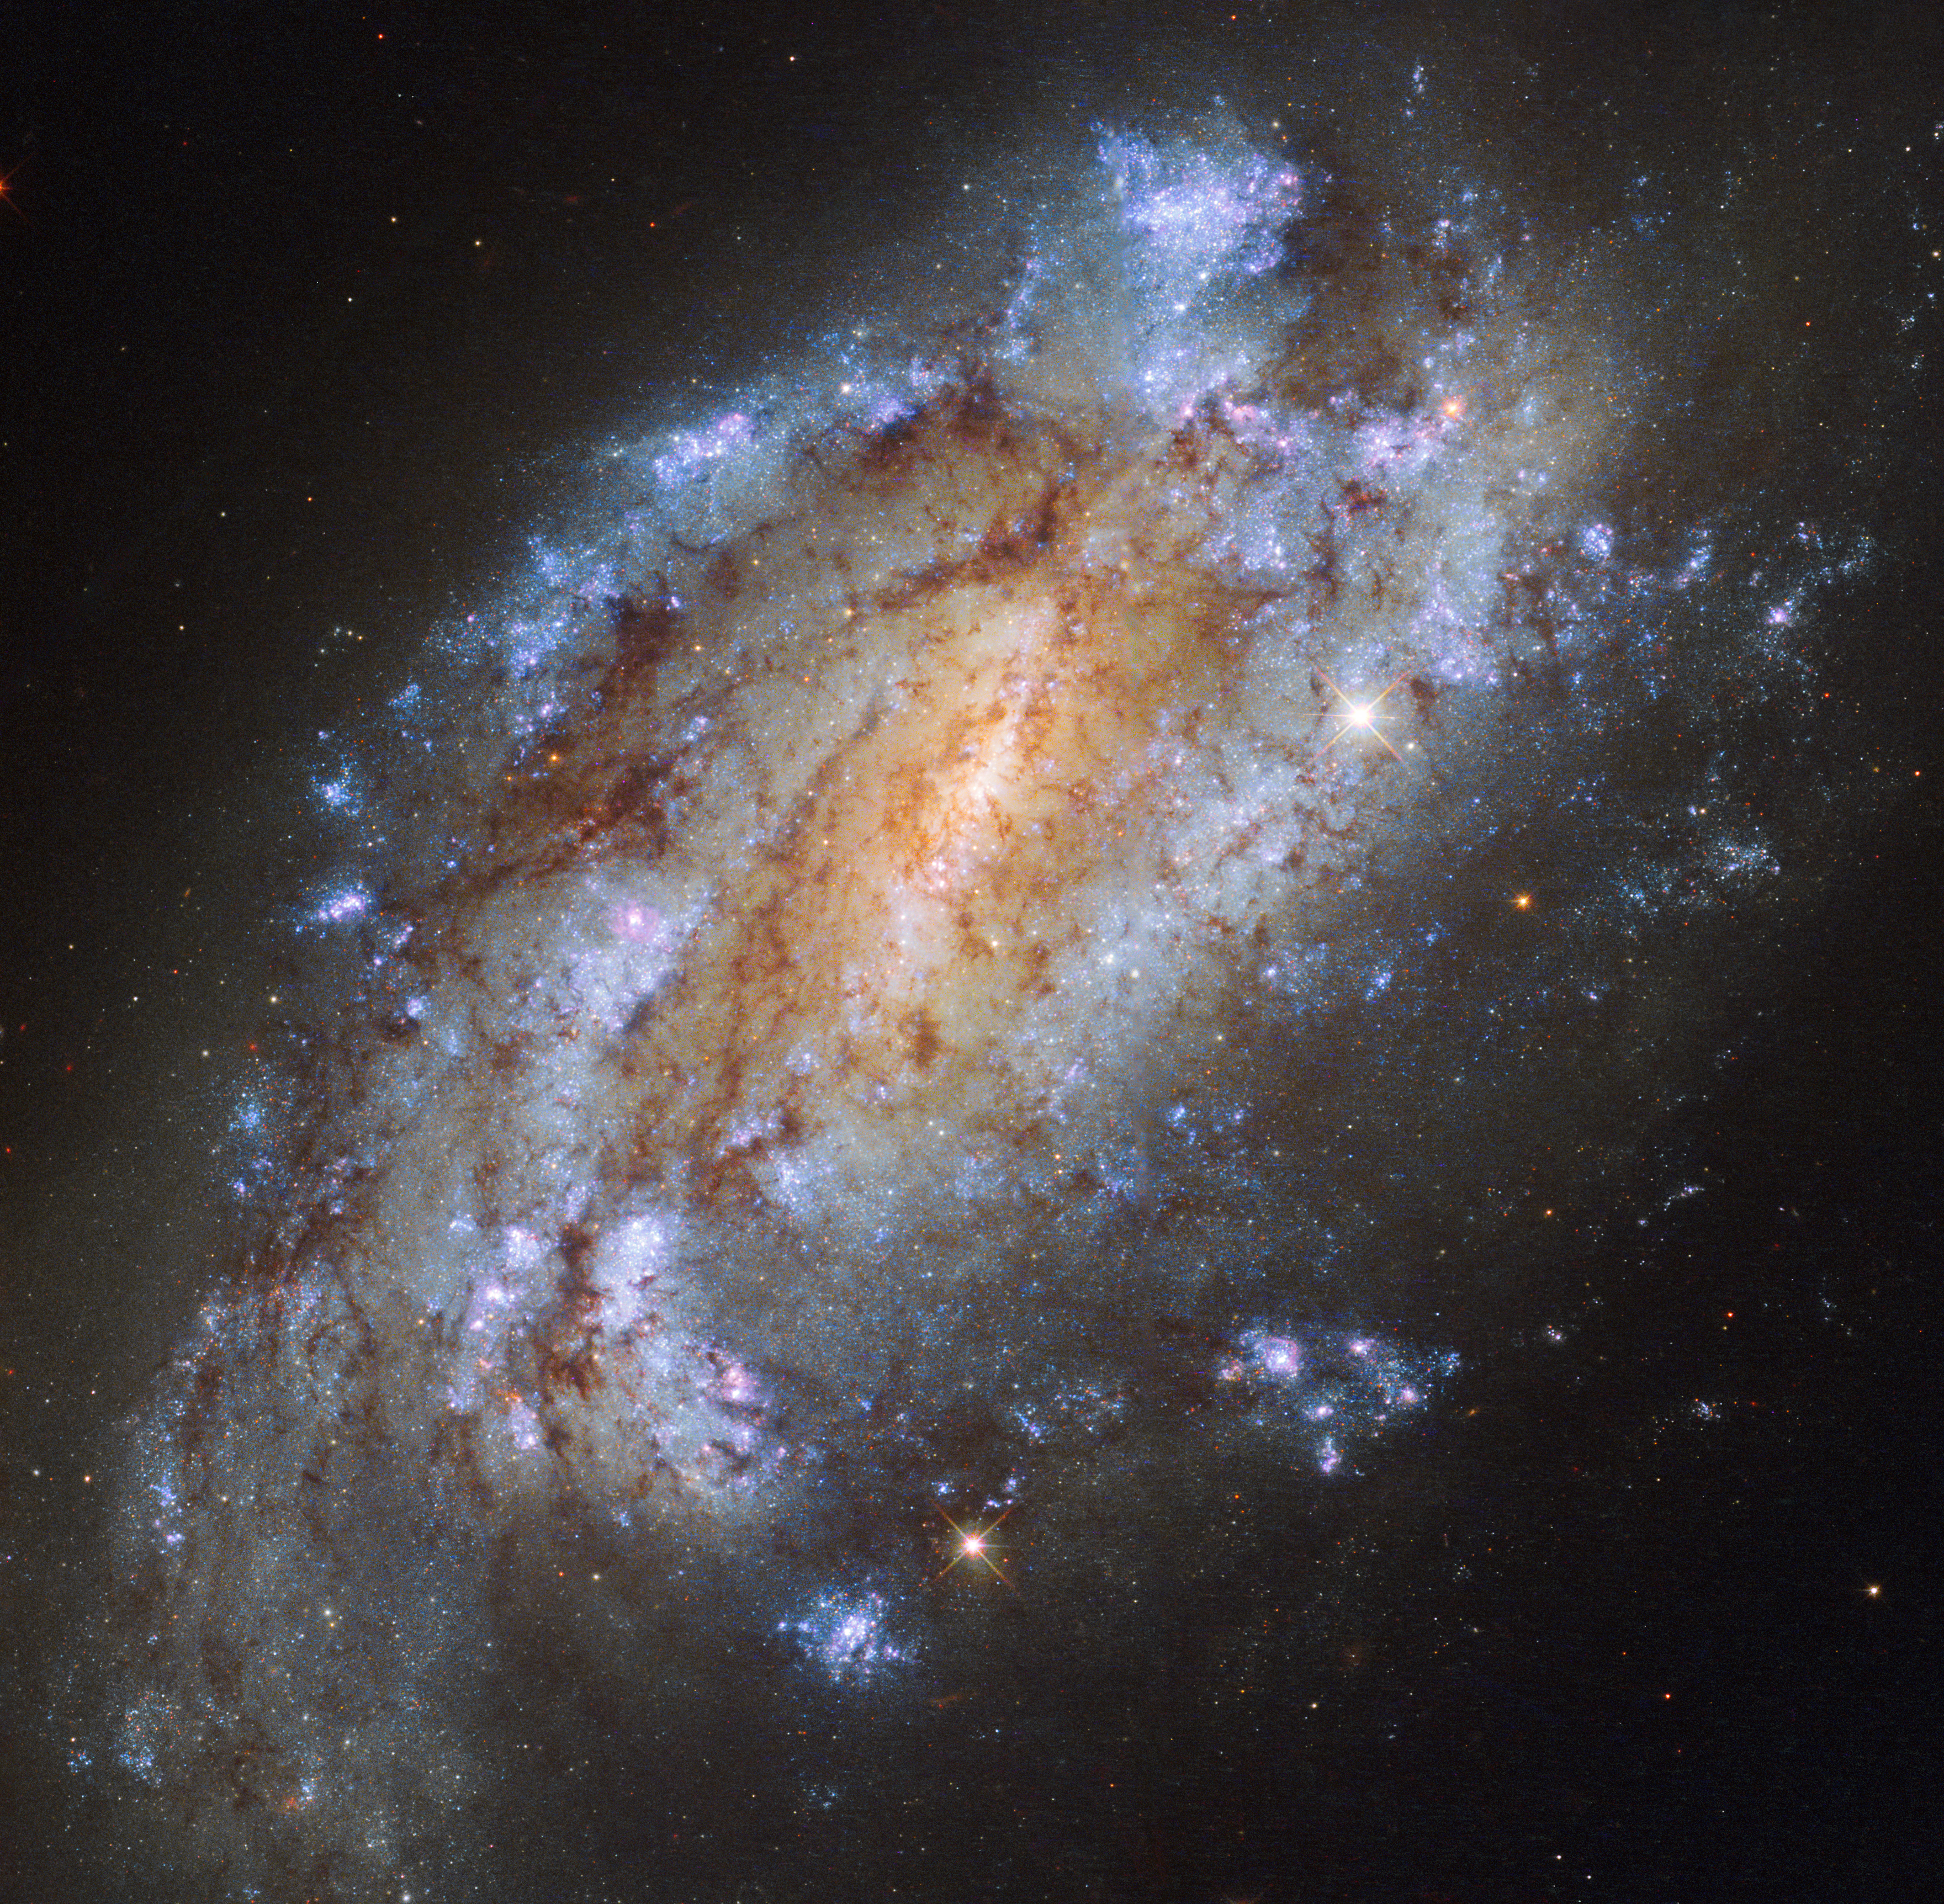

The loneliest firework display

Roughly 50 million light-years away lies a somewhat overlooked little galaxy named NGC 1559. Pictured here by Hubble’s Wide Field Camera 3, this barred spiral lies in the little-observed southern constellation of Reticulum (The Reticule).

NGC 1559 has massive spiral arms chock-full of star formation, and is receding from us at a speed of about 1300 km/s. The galaxy contains the mass of around ten billion Suns — while this may sound like a lot, that is almost 100 times less massive than the Milky Way. Although NGC 1559 appears to sit near one of our nearest neighbours in the sky — the Large Magellanic Cloud (LMC), this is just a trick of perspective. In reality, NGC 1559 is physically nowhere near the LMC in space — in fact, it truly is a loner, lacking the company of any nearby galaxies or membership of any galaxy cluster.

Despite its lack of cosmic companions, when this lonely galaxy has a telescope pointed in its direction, it puts on quite a show! NGC 1559 has hosted a variety of spectacular exploding stars called supernovae, four of which we have observed — in 1984, 1986, 2005, and 2009 (SN 1984J, 1986L, 2005df [a Type Ia], and 2009ib [a Type II-P, with an unusually long plateau]).

NGC 1559 may be alone in space, but we are watching and admiring from far away.

Credit: ESA/Hubble & NASA